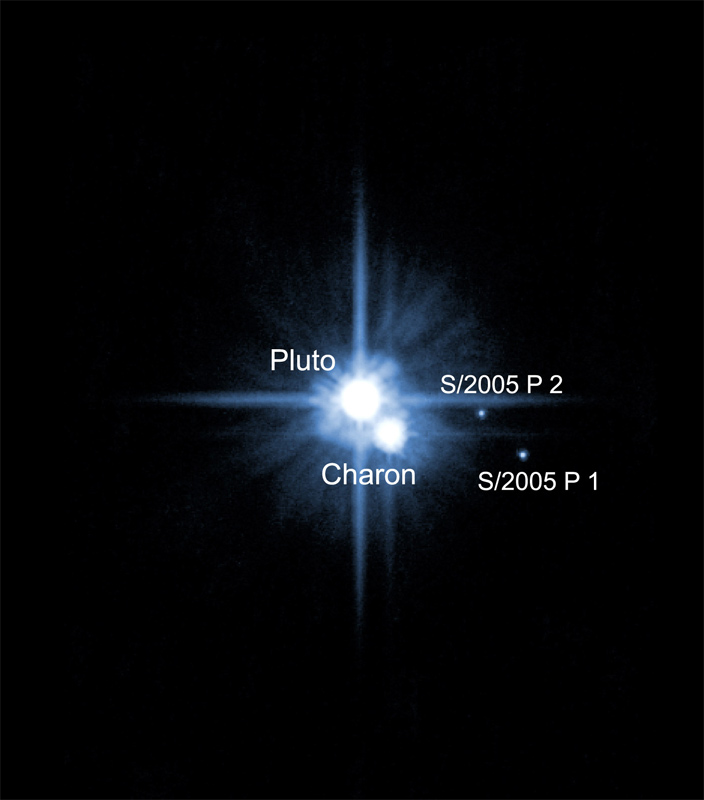

The Pluto system on Feb. 15, 2006 (annotated)

Anxiously awaited follow-up observations with the NASA/ESA Hubble Space Telescope have confirmed the presence of two new moons around the distant planet Pluto. The moons were first discovered by Hubble in May 2005, but the science team probed even deeper into the Pluto system last week to look for additional satellites and to characterize the orbits of the moons.

Credit: NASA, ESA, H. Weaver (JHU/APL), A. Stern (SwRI), and the HST Pluto Companion Search Team